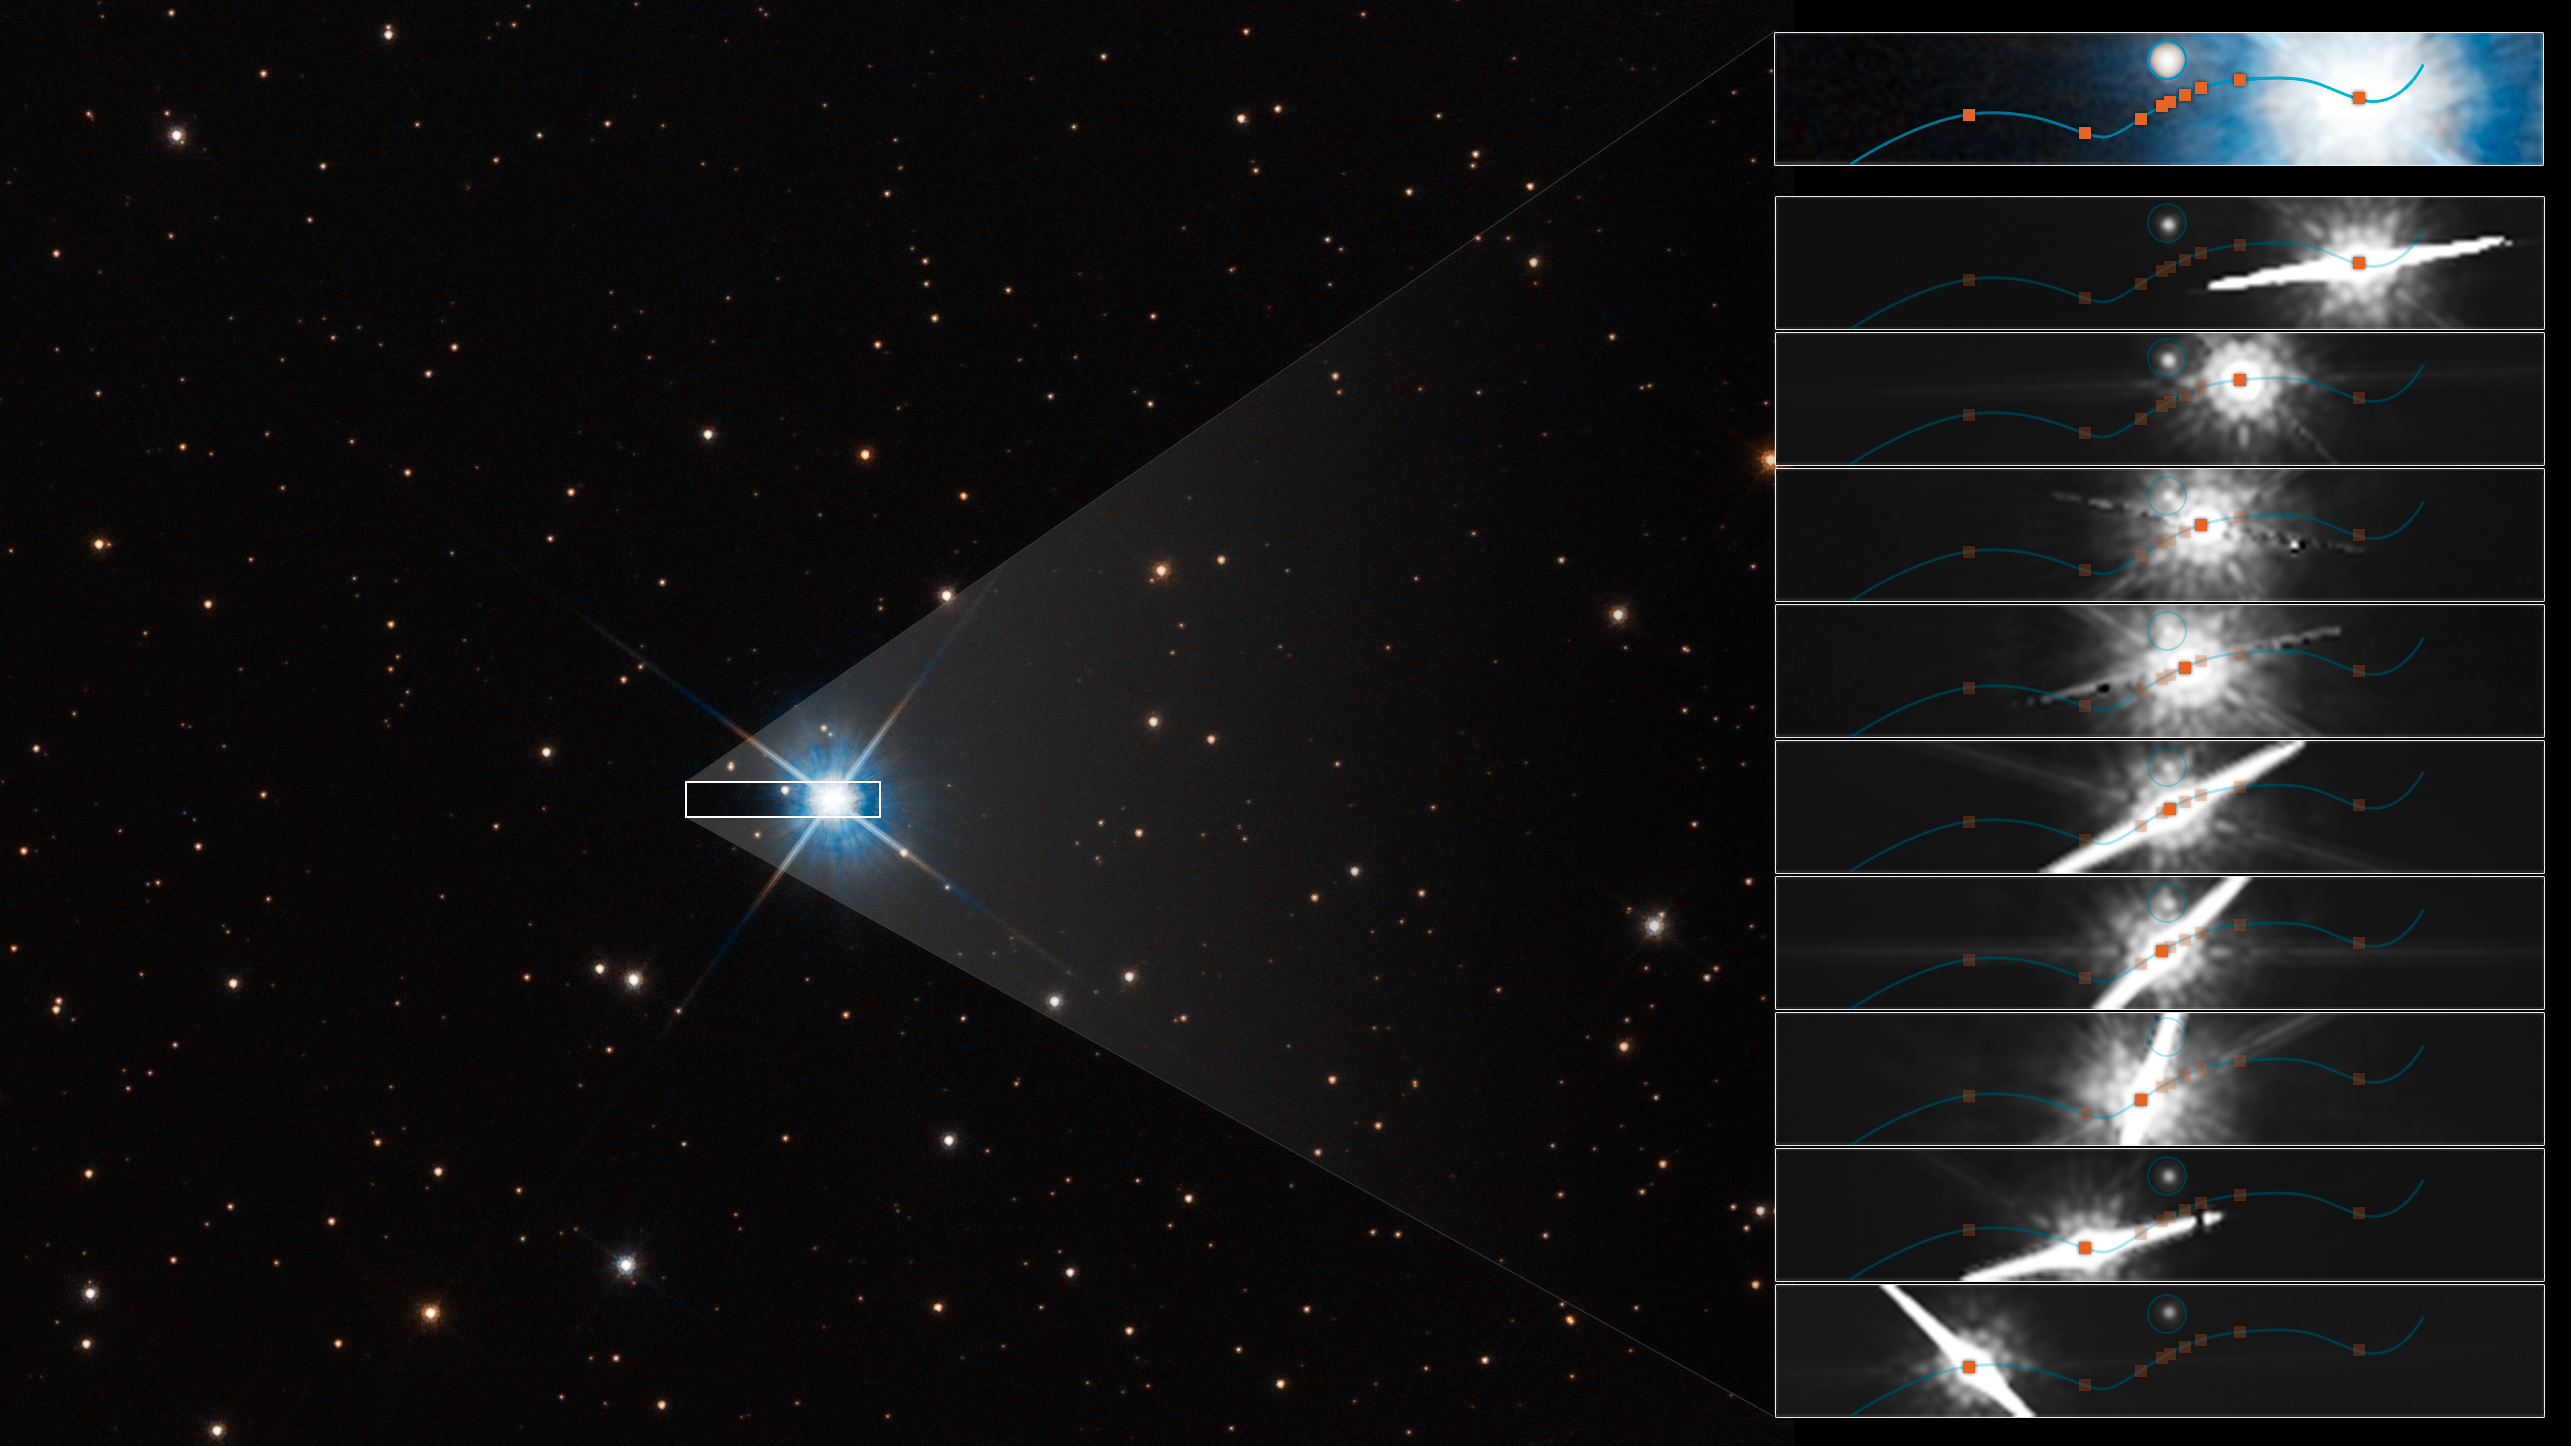

Hubble Uses Microlensing To Measure the Mass of a White Dwarf (Clean)

This graphic shows how microlensing was used to measure the mass of a white dwarf star.

The dwarf, called LAWD 37, is a burned-out star in the centre of this Hubble Space Telescope image. Though its nuclear fusion furnace has shut down, trapped heat is sizzling on the surface at roughly 100 000 degrees Celsius, causing the stellar remnant to glow fiercely.

The inset boxes at right plot how the dwarf passed in front of a background star in 2019. The wavy blue line traces the dwarf’s apparent motion across the sky as seen from Earth. Though the dwarf is following a straight trajectory, the motion of Earth as it orbits the Sun imparts an apparent sinusoidal offset due to parallax. (The star is only 15 light-years away, and therefore is moving at a faster rate against the stellar background.)

As it passed by the fainter background star, the dwarf’s gravitational field warped space (as Einstein’s general theory of relativity predicted a century ago). And this deflection was precisely measured by Hubble’s extraordinary resolution. The dwarf’s offset position is coloured orange.

The amount of deflection yields a mass for the white dwarf of 56 percent our Sun’s mass, and this provides insights into theories of the structure and composition of white dwarfs. This is the first time that astronomers have directly measured the mass of a single, isolated star other than our Sun.

The white dwarf has a ‘spike’ because it is so bright that the light ‘bled’ into the Hubble camera’s CCD detector. This interfered with one of the observing dates for measuring that background star’s position on the sky.

Credit: NASA, ESA, P. McGill (Univ. of California, Santa Cruz and University of Cambridge), K. Sahu (STScI), J. Depasquale (STScI)